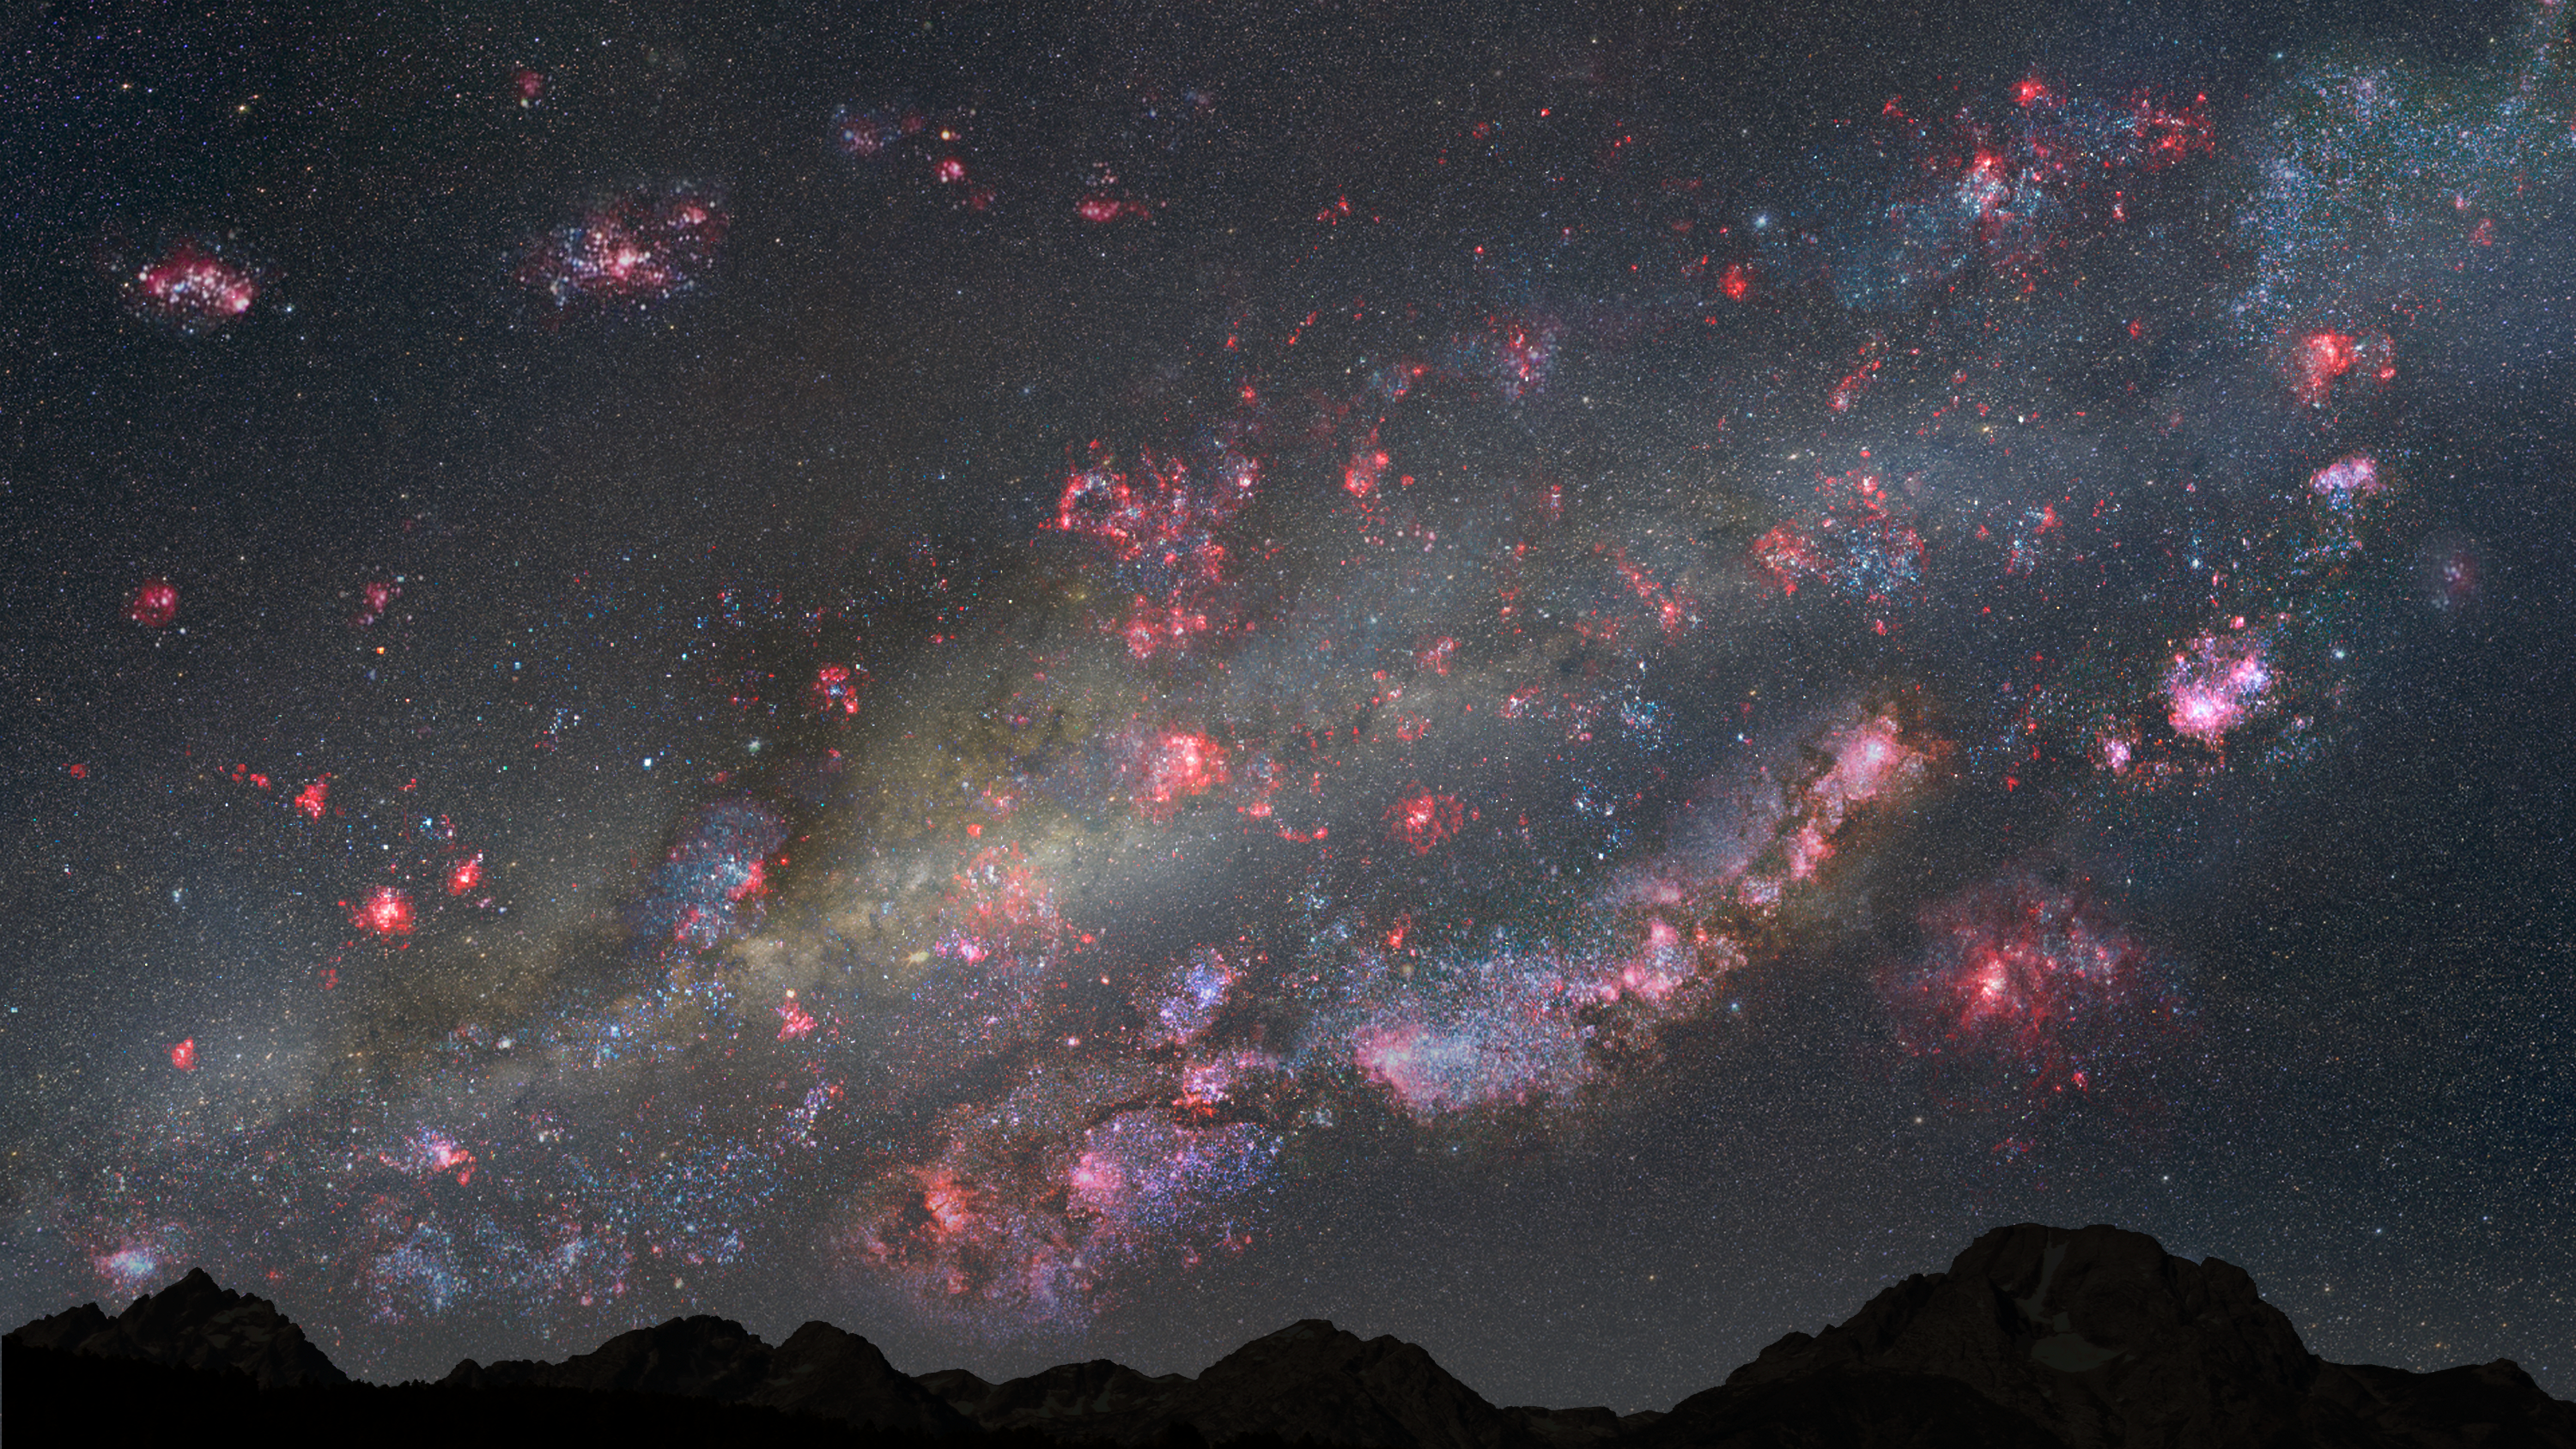

A firestorm of star birth (artist’s illustration)

This illustration depicts a view of the night sky from a hypothetical planet within the youthful Milky Way galaxy 10 billion years ago. The heavens are ablaze with a firestorm of star birth; glowing pink clouds of hydrogen gas harbour countless newborn stars, and the bluish-white hue of young star clusters litter the landscape. The star birth rate is 30 times higher than it is in the Milky Way today. The Sun, however, is not among these fledgling stars — it will not be born for another 5 billion years.

Credit: NASA, ESA, and Z. Levay (STScI)